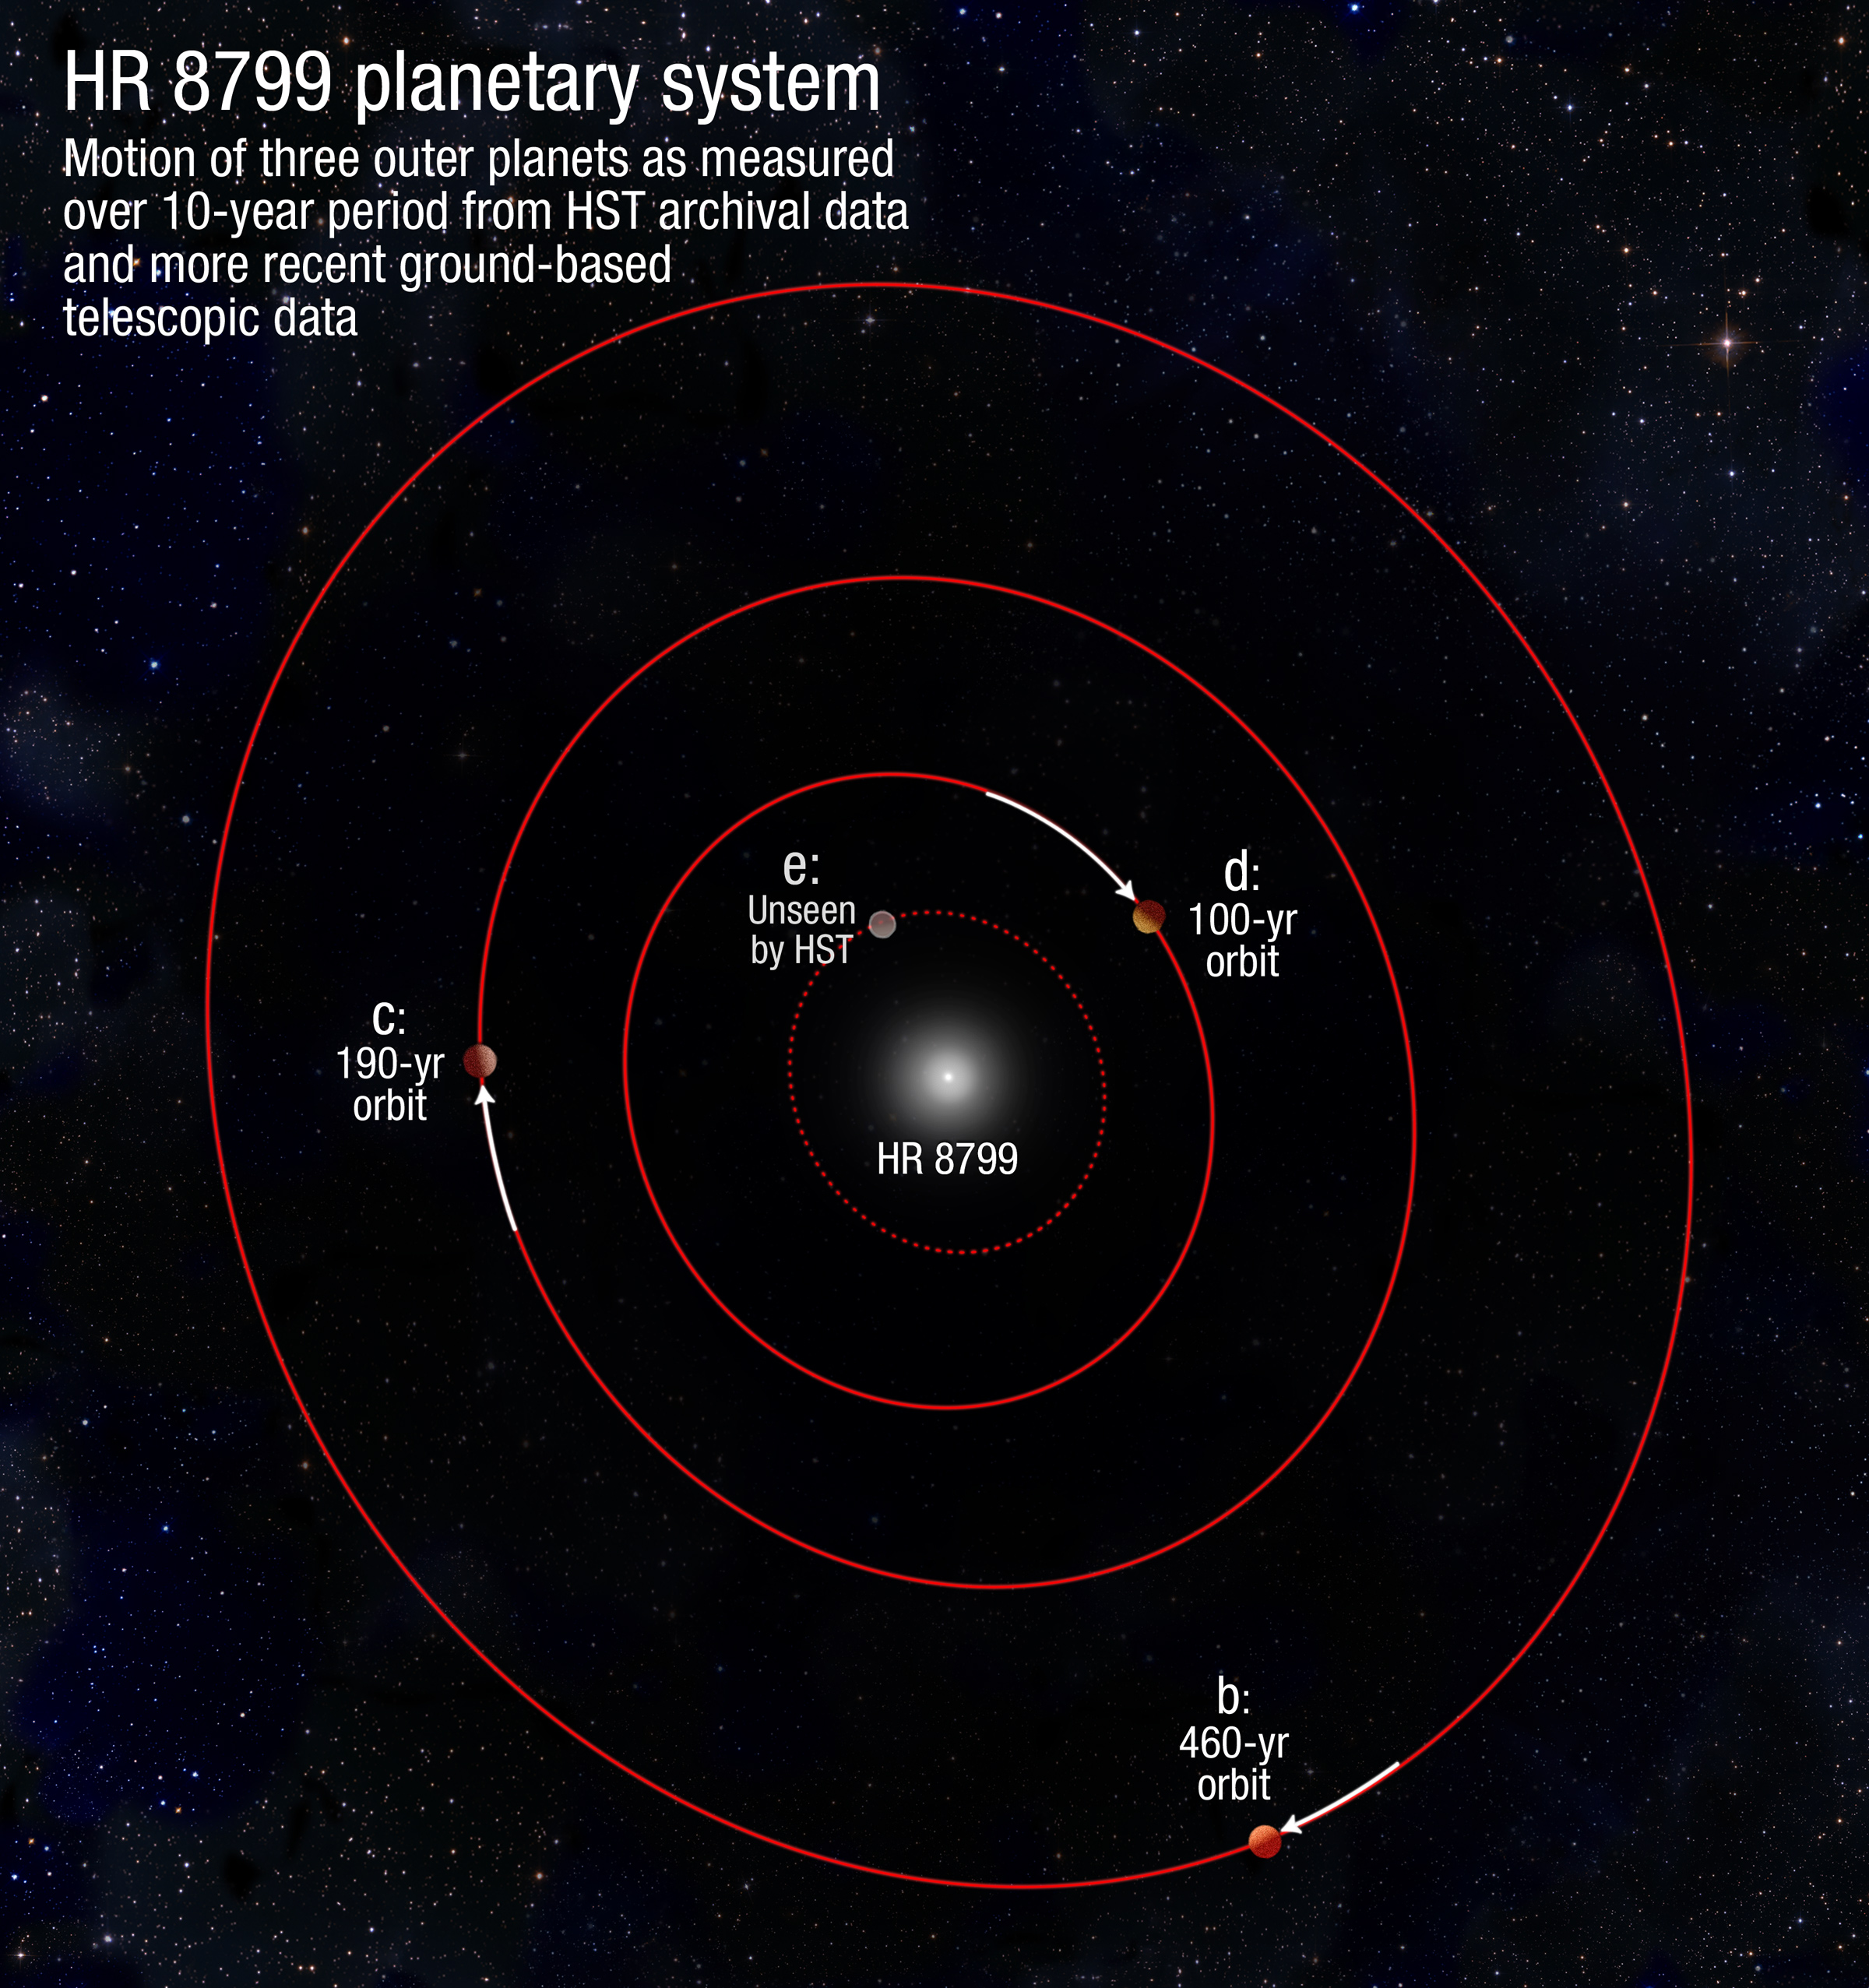

HR 8799 planetary system

This artist's illustration shows the motion of three of the outermost planets in the HR 8799 system as measured over a 10-year period from Hubble Space Telescope archival data and more recent ground-based telescopic data.

Credit: NASA, ESA, and A. Feild (STScI). Science Credit: NASA, ESA, and R. Soummer (STScI)